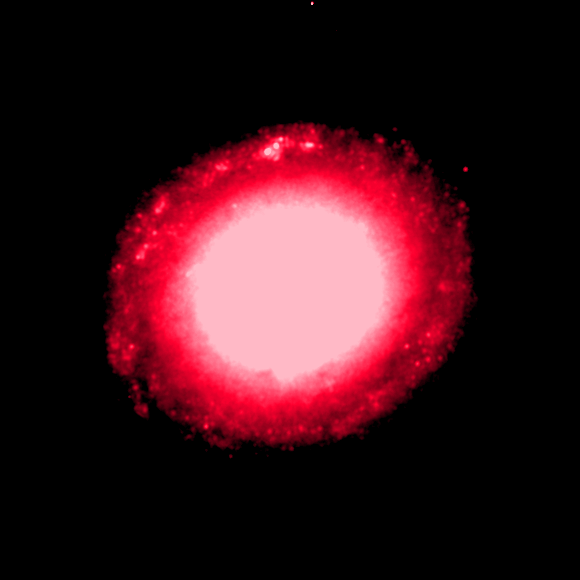

Individual colour images - 7 (NICMOS, 1870 nm)

This is the seventh in a sequence of seven images which demonstrate the Hubble telescope's wavelength range, starting in the far ultraviolet and stretching all the way to the infrared.

This image was taken by the Near Infrared Camera and Multi-Object Spectrometer (NICMOS). The red colour (1870 nm) shows radiation from slightly farther into the infrared region. The image was taken on 29 July, 1998, and has an exposure time of 640 s.

This image is issued jointly by NASA and ESA.

Credit: NASA, ESA, Dan Maoz (Tel-Aviv University, Israel, and Columbia University, USA)